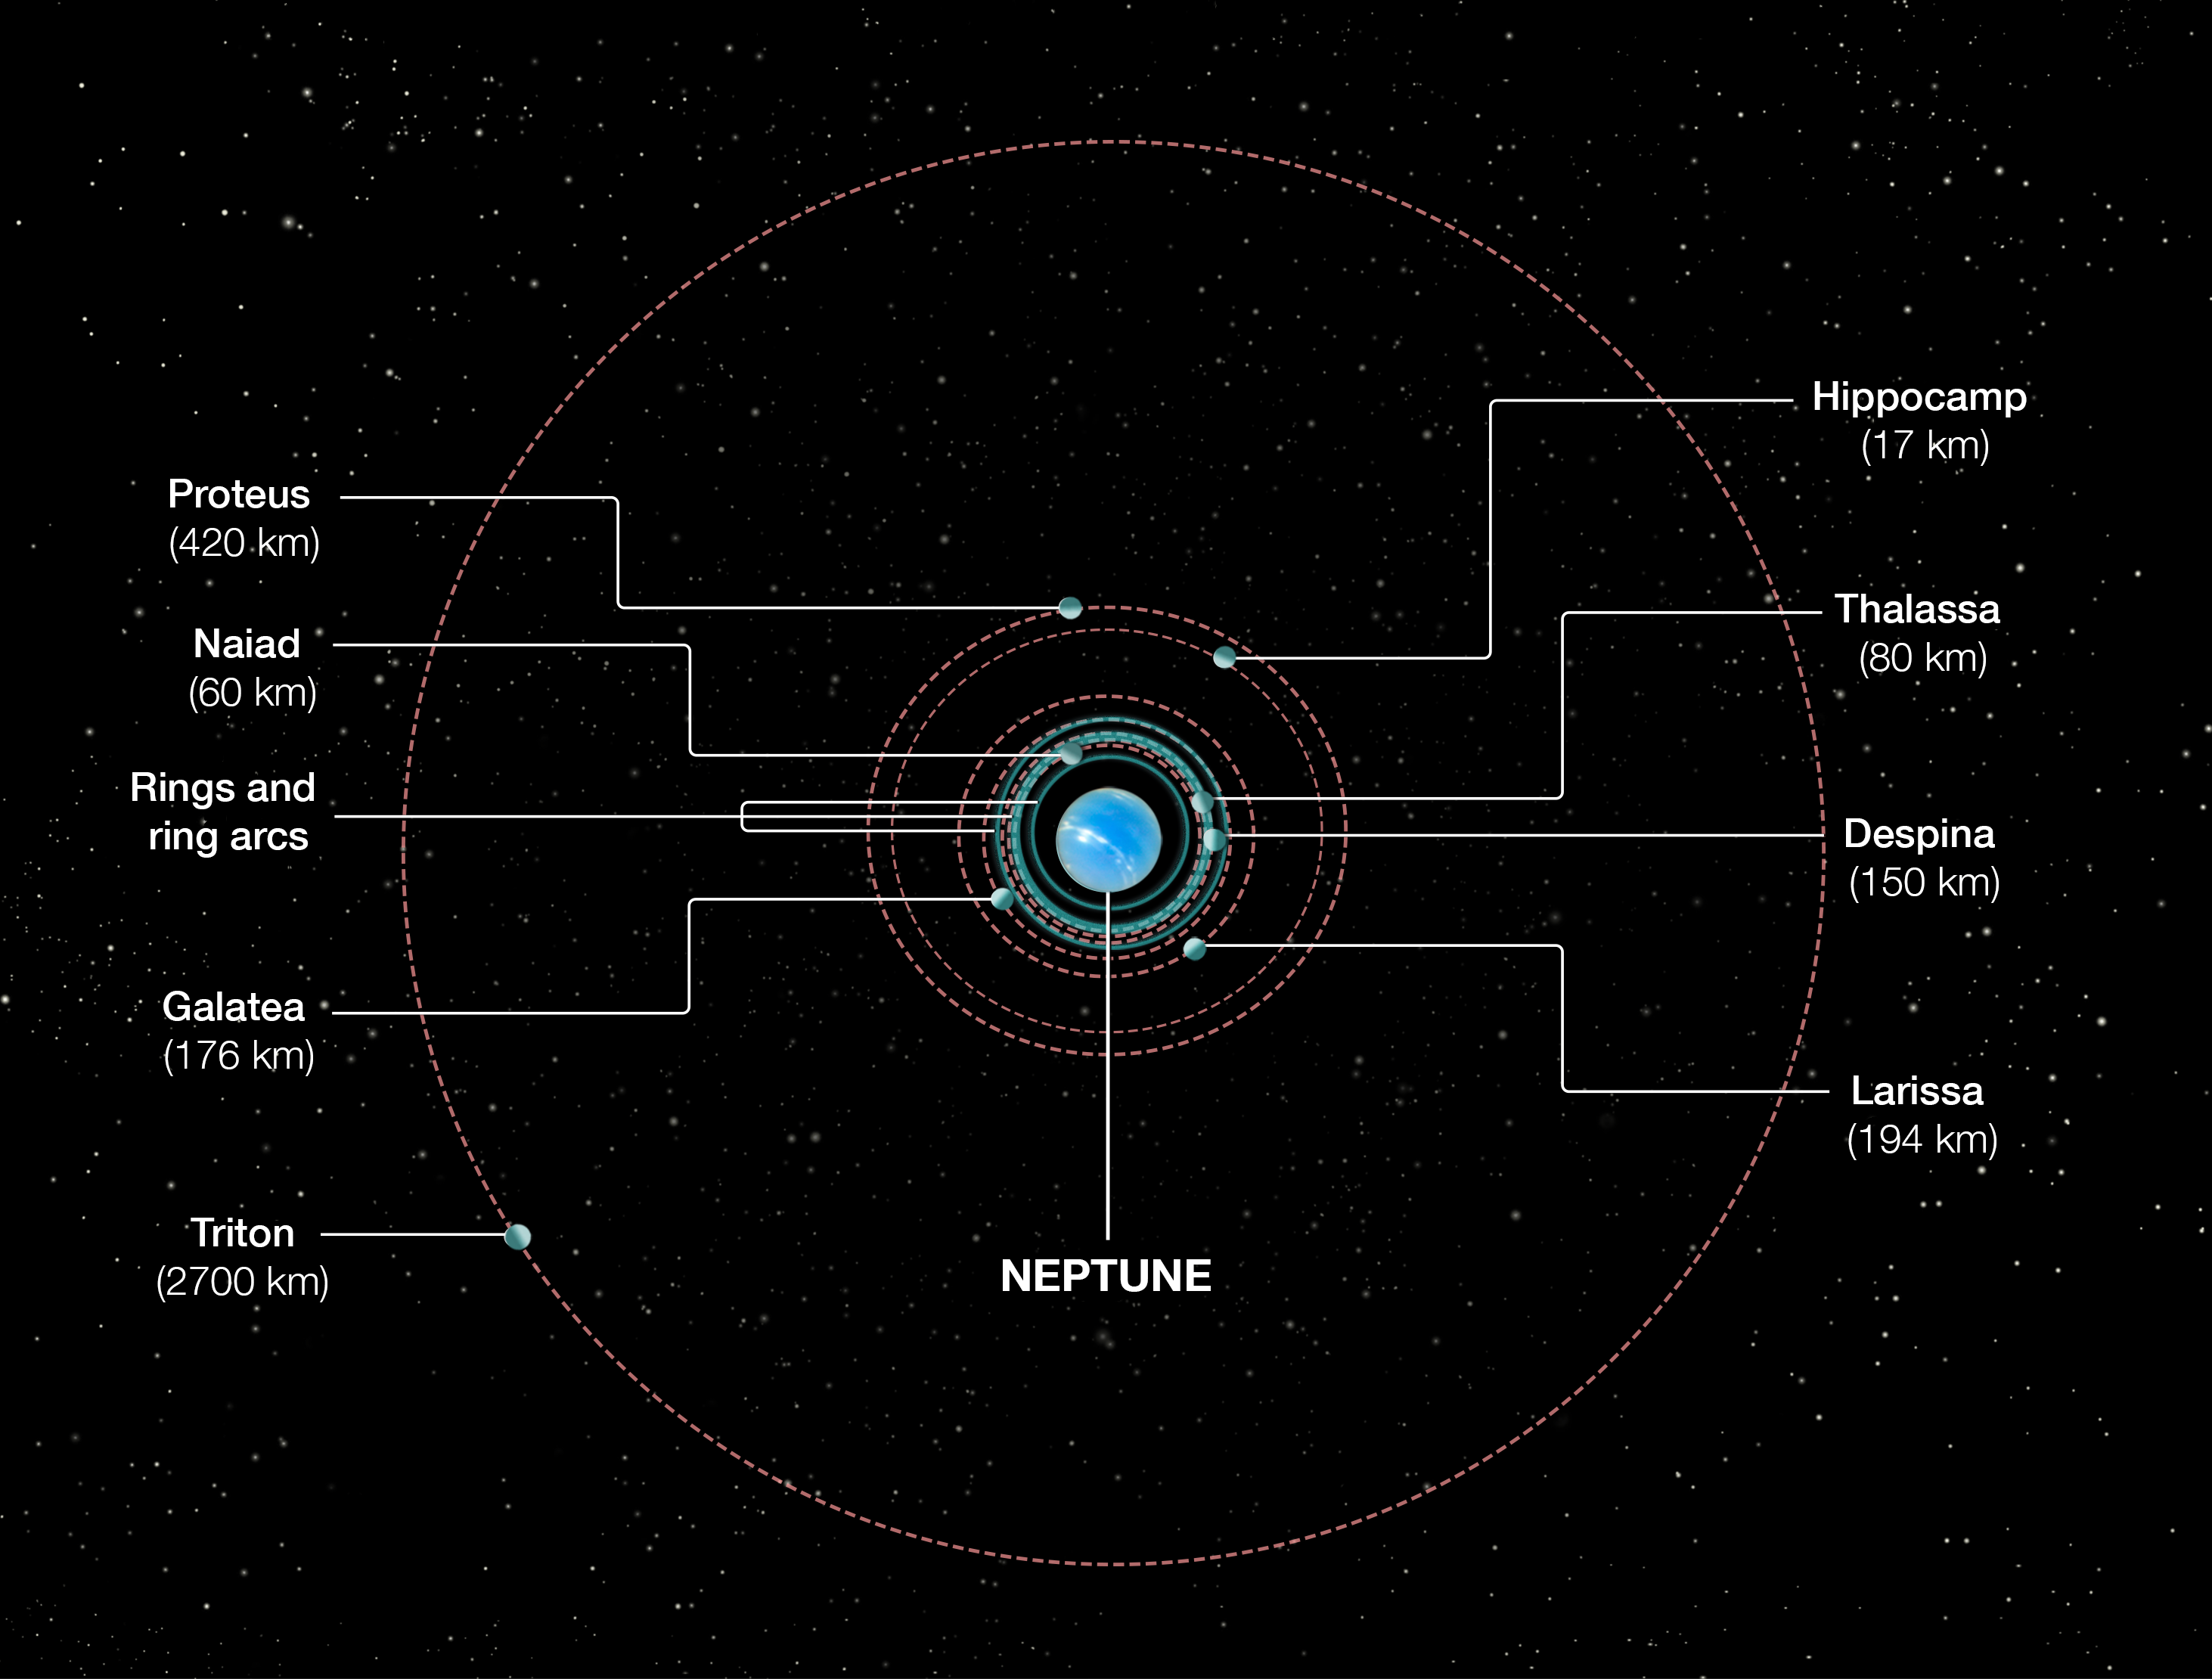

Orbits of Neptune’s inner moons

This diagram shows the orbital positions of Neptune’s inner moons, which range in size from 17 to 420 kilometres in diameter. The outer moon Triton was captured from the Kuiper belt many billions of years ago.

This tore apart Neptune’s original satellite system. After Triton settled into a circular orbit the debris from shattered moons re-coalesced into the second generation of inner satellites seen today.

However, comet bombardment continued, leading to the birth of Hippocamp, which is a broken-off piece of Proteus. Therefore, Hippocamp is considered to be a third-generation satellite.

Neither the size of the moons and Neptune, nor the orbits are to scale.

Credit: NASA, ESA, and A. Feild (STScI)